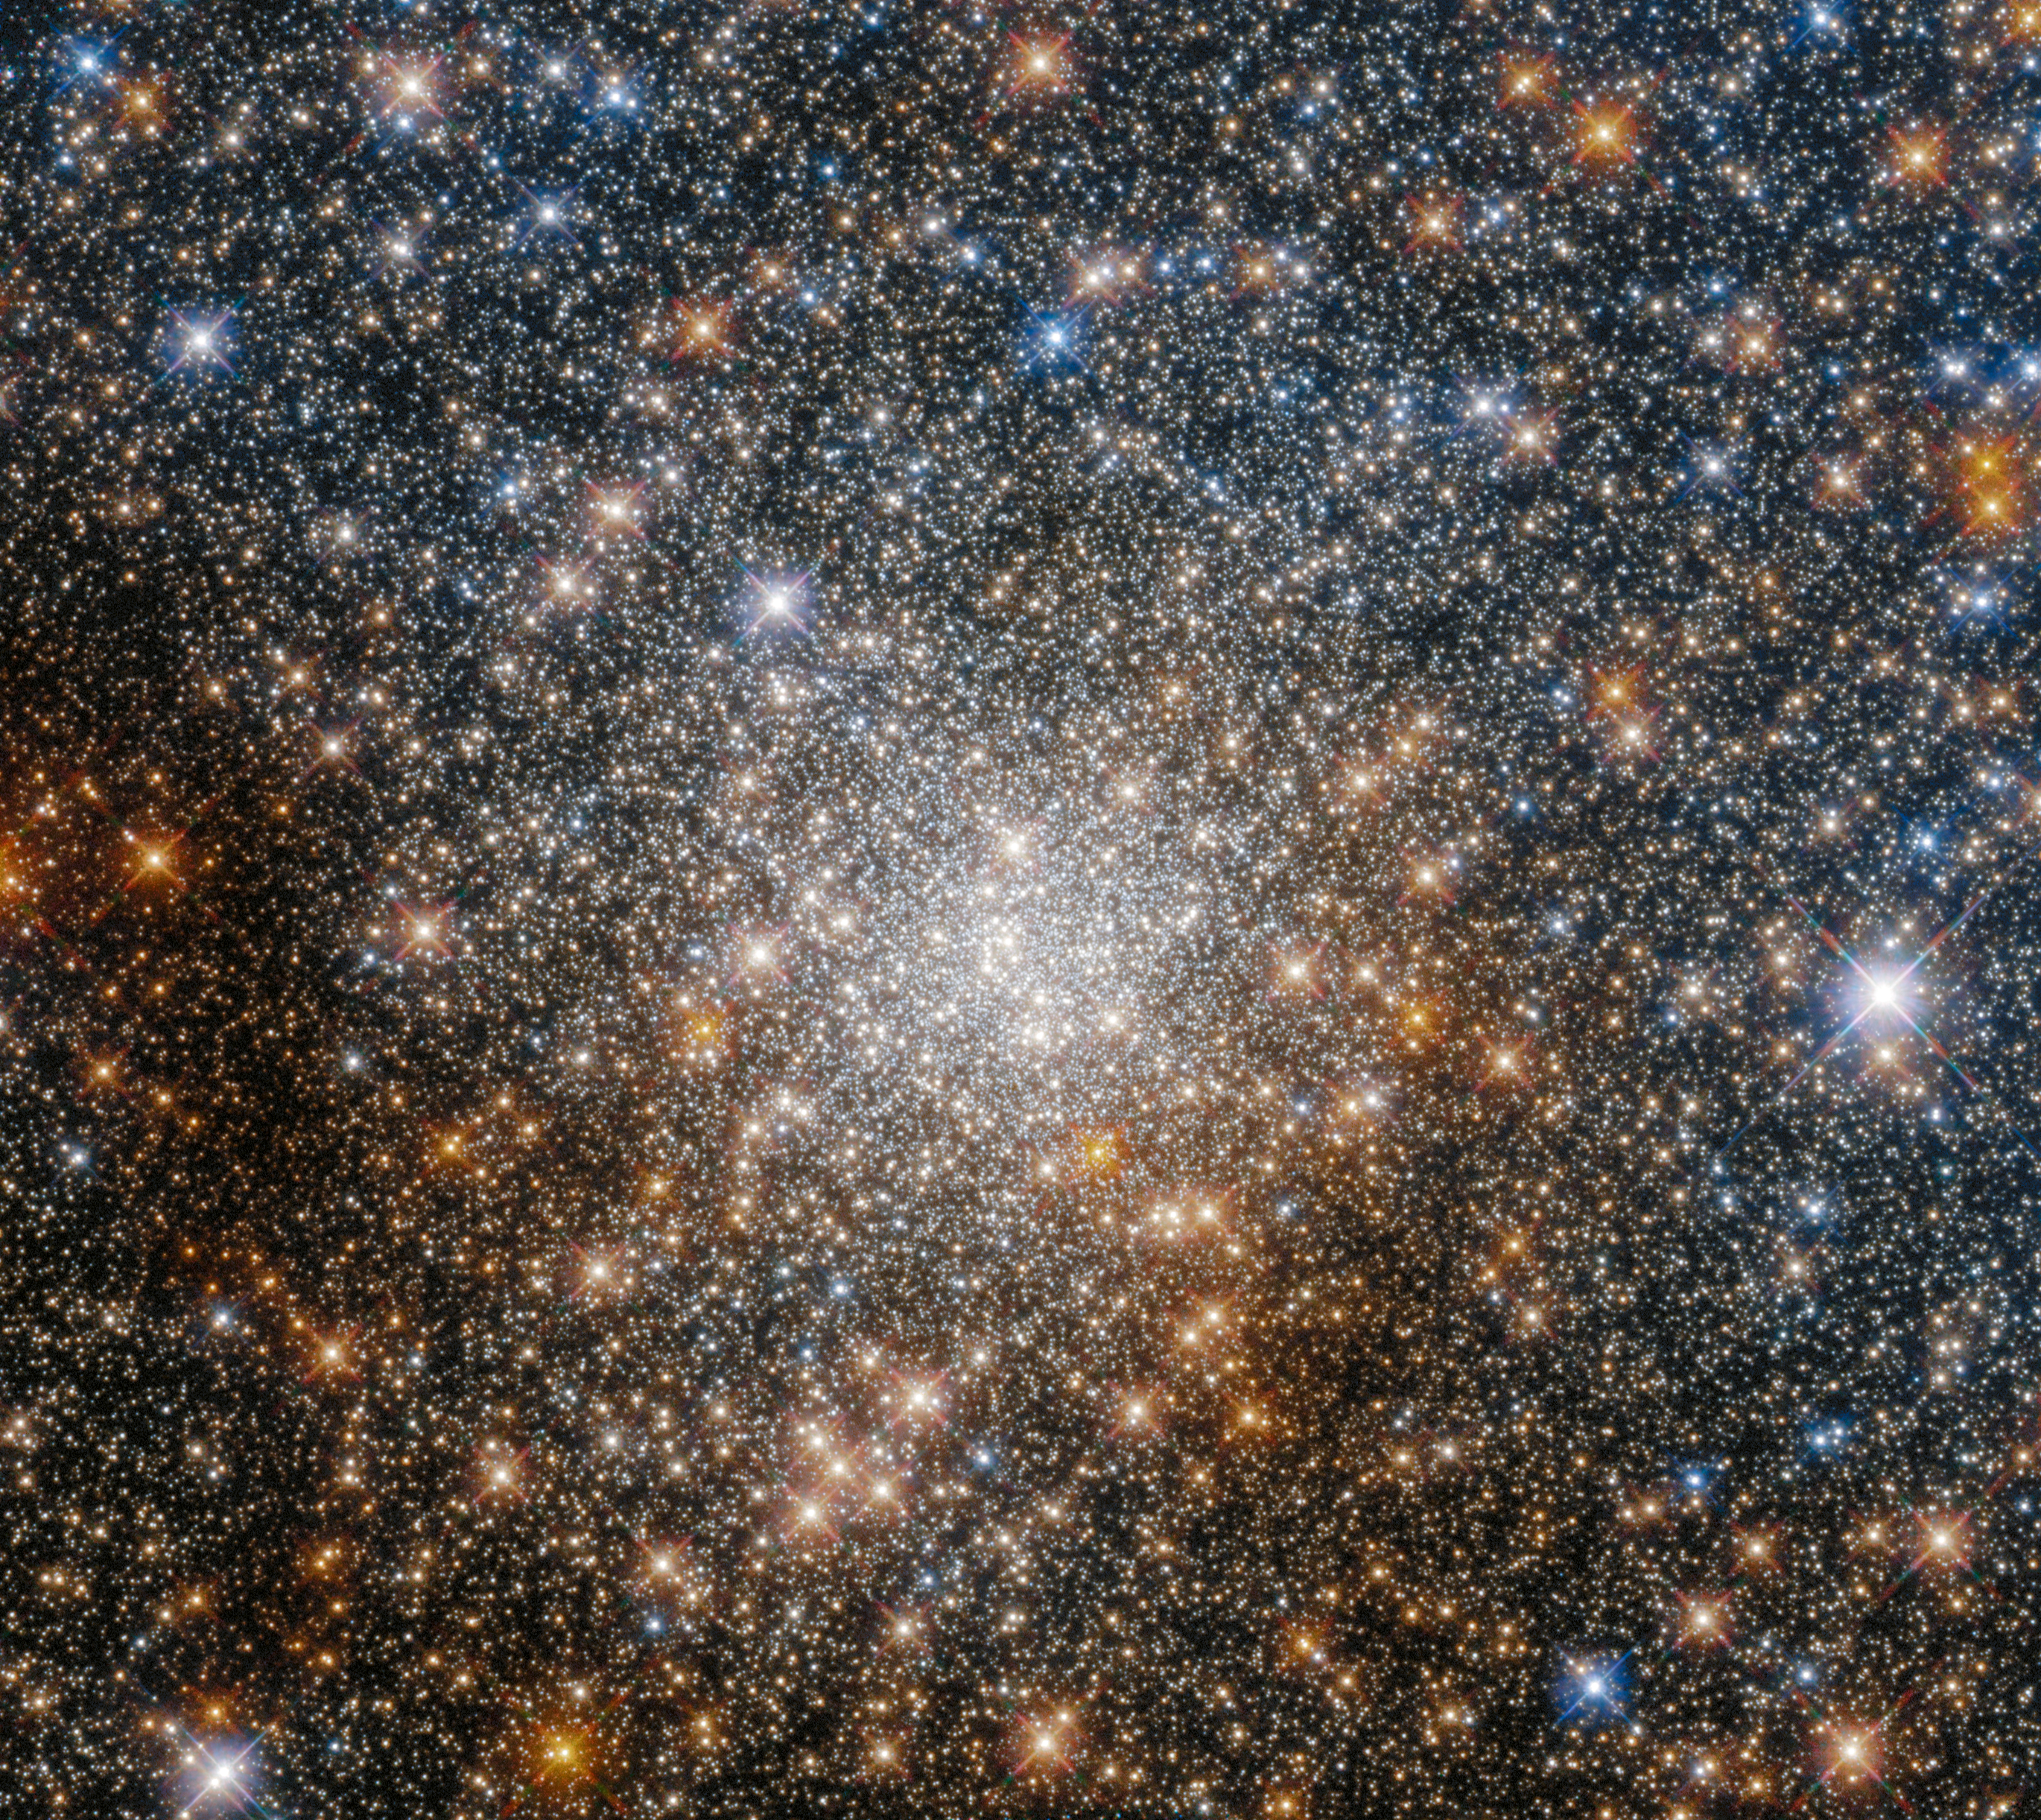

Cosmic Treasure Chest

This star-studded image shows the globular cluster Terzan 9 in the constellation Sagittarius, towards the centre of the Milky Way. The NASA/ESA Hubble Space Telescope captured this glittering scene using its Wide Field Camera 3 and Advanced Camera for Surveys.

Globular clusters are stable, tightly bound groupings of tens of thousands to millions of stars. As this image demonstrates, the hearts of globular clusters can be densely packed with stars; the night sky in this image is strewn with so many stars that it resembles a sea of sequins or a vast treasure chest crammed with gold.

This starry snapshot is from a Hubble programme investigating globular clusters located towards the heart of the Milky Way. The central region of our home galaxy contains a tightly packed group of stars known as the Galactic bulge, which is also rich in interstellar dust. This dust has made globular clusters near the Galactic centre difficult to study, as it absorbs starlight and can even change the apparent colours of the stars in these clusters. Hubble's sensitivity at both visible and infrared wavelengths has allowed astronomers to measure how the colours of these globular clusters have been changed by interstellar dust, and thereby to establish their ages.

Credit: ESA/Hubble & NASA, R. Cohen